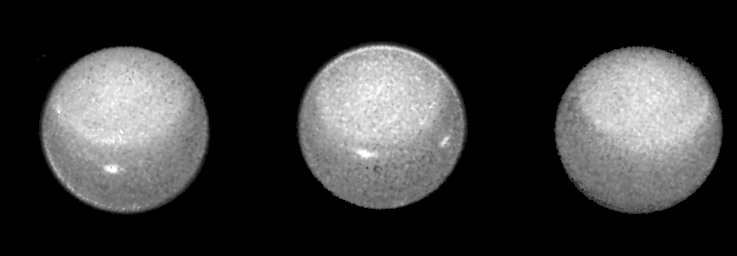

Stormy Weather on Uranus

These three Hubble Space Telescope images of the planet Uranus reveal the motion of a pair of bright clouds in the planet's southern hemisphere, and a high altitude haze that forms a 'cap' above the planet's south pole.

Credit: Kenneth Seidelmann, U.S. Naval Observatory, and NASA/ESA